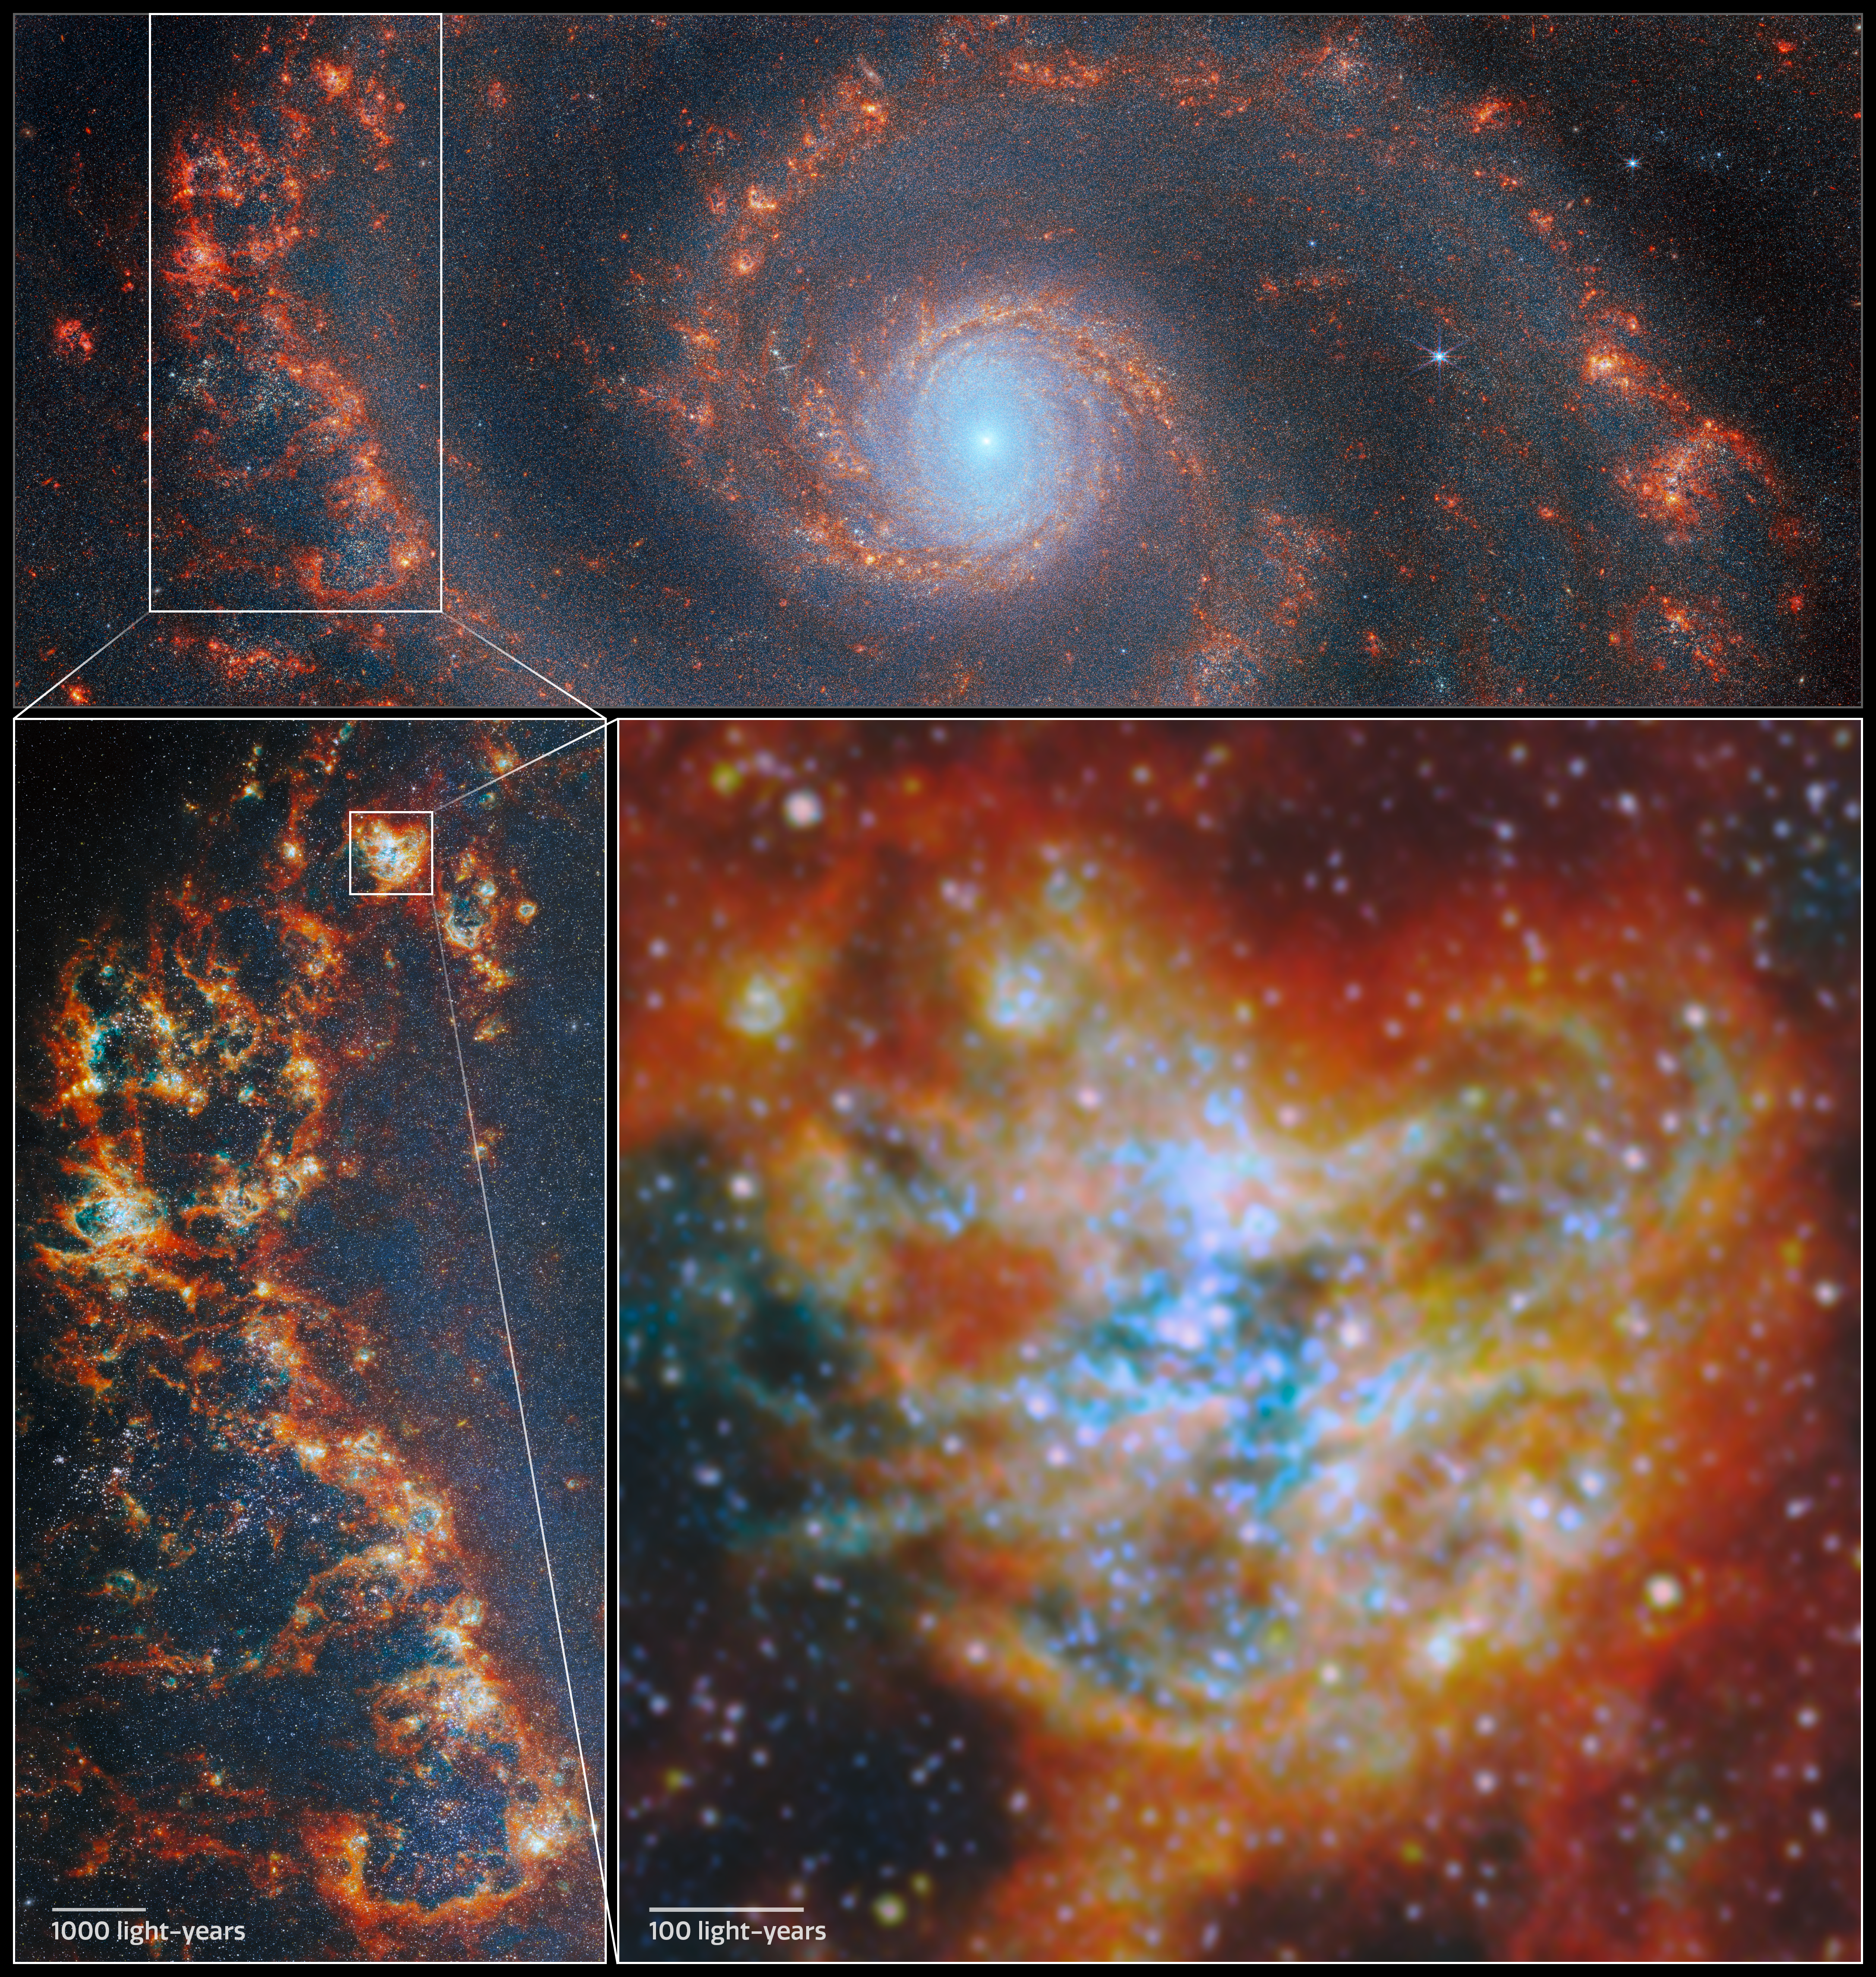

Location of star-forming region in M51

Astronomers have long known that understanding how star clusters come to be is key to unlocking other secrets of galactic evolution. Stars form in clusters, created when clouds of gas collapse under gravity. As more and more stars are born in a collapsing cloud, strong stellar winds, harsh ultraviolet radiation and the supernova explosions of massive stars eventually disperse the cloud, and their light can bear down on other star-forming regions in the galaxy. This process is called stellar feedback, and it means that most of the gas in a galaxy never gets used for star formation. Researching how star clusters develop can answer questions about star formation at a galactic scale.

Now, the state of the art has been further developed with both Hubble and Webb working together to provide a broad-spectrum view of thousands of young star clusters. An international team of astronomers has pored over images of four nearby galaxies from the FEAST observing programme (#1783), trying to solve this mystery. Their results show that it is the most massive star clusters that clear away their gaseous shroud the fastest, and begin lighting their galaxy the earliest.

The team identified nearly 9000 star clusters in the four galaxies in different evolutionary stages: young clusters just starting to emerge from their natal clouds of gas, clusters that had partially dispersed the gas (both from Webb images), and fully unobstructed clusters visible in optical light (found in Hubble images). With Webb’s ability to peer inside the gas clouds, they were able to then estimate the mass and age of each cluster from its light spectrum.

This image locates a star-forming complex in one of the spiral arms of Messier 51 (M51), measuring almost 800 light-years across. M51 is located about 27 million light-years away from Earth. The thick cloud of star-forming gas, in which clumps collapsed to form each of the individual star clusters, is shown here in red and orange colours that represent infrared light emitted by ionised gas, dust grains, and complex molecules such as polycyclic aromatic hydrocarbons (PAHs).

Many of the bright dots that can be seen within the clouds are star clusters. The massive young stars within cast powerful radiation on the gas clouds that surround them, creating the cyan illumination shown here. Eventually, the combination of radiation, stellar wind and the supernova explosions of the most massive of these stars will disperse the gas clouds, putting an end to the star formation in this part of M51.

Credit: ESA/Webb, NASA & CSA, A. Pedrini, A. Adamo (Stockholm University) and the FEAST JWST team